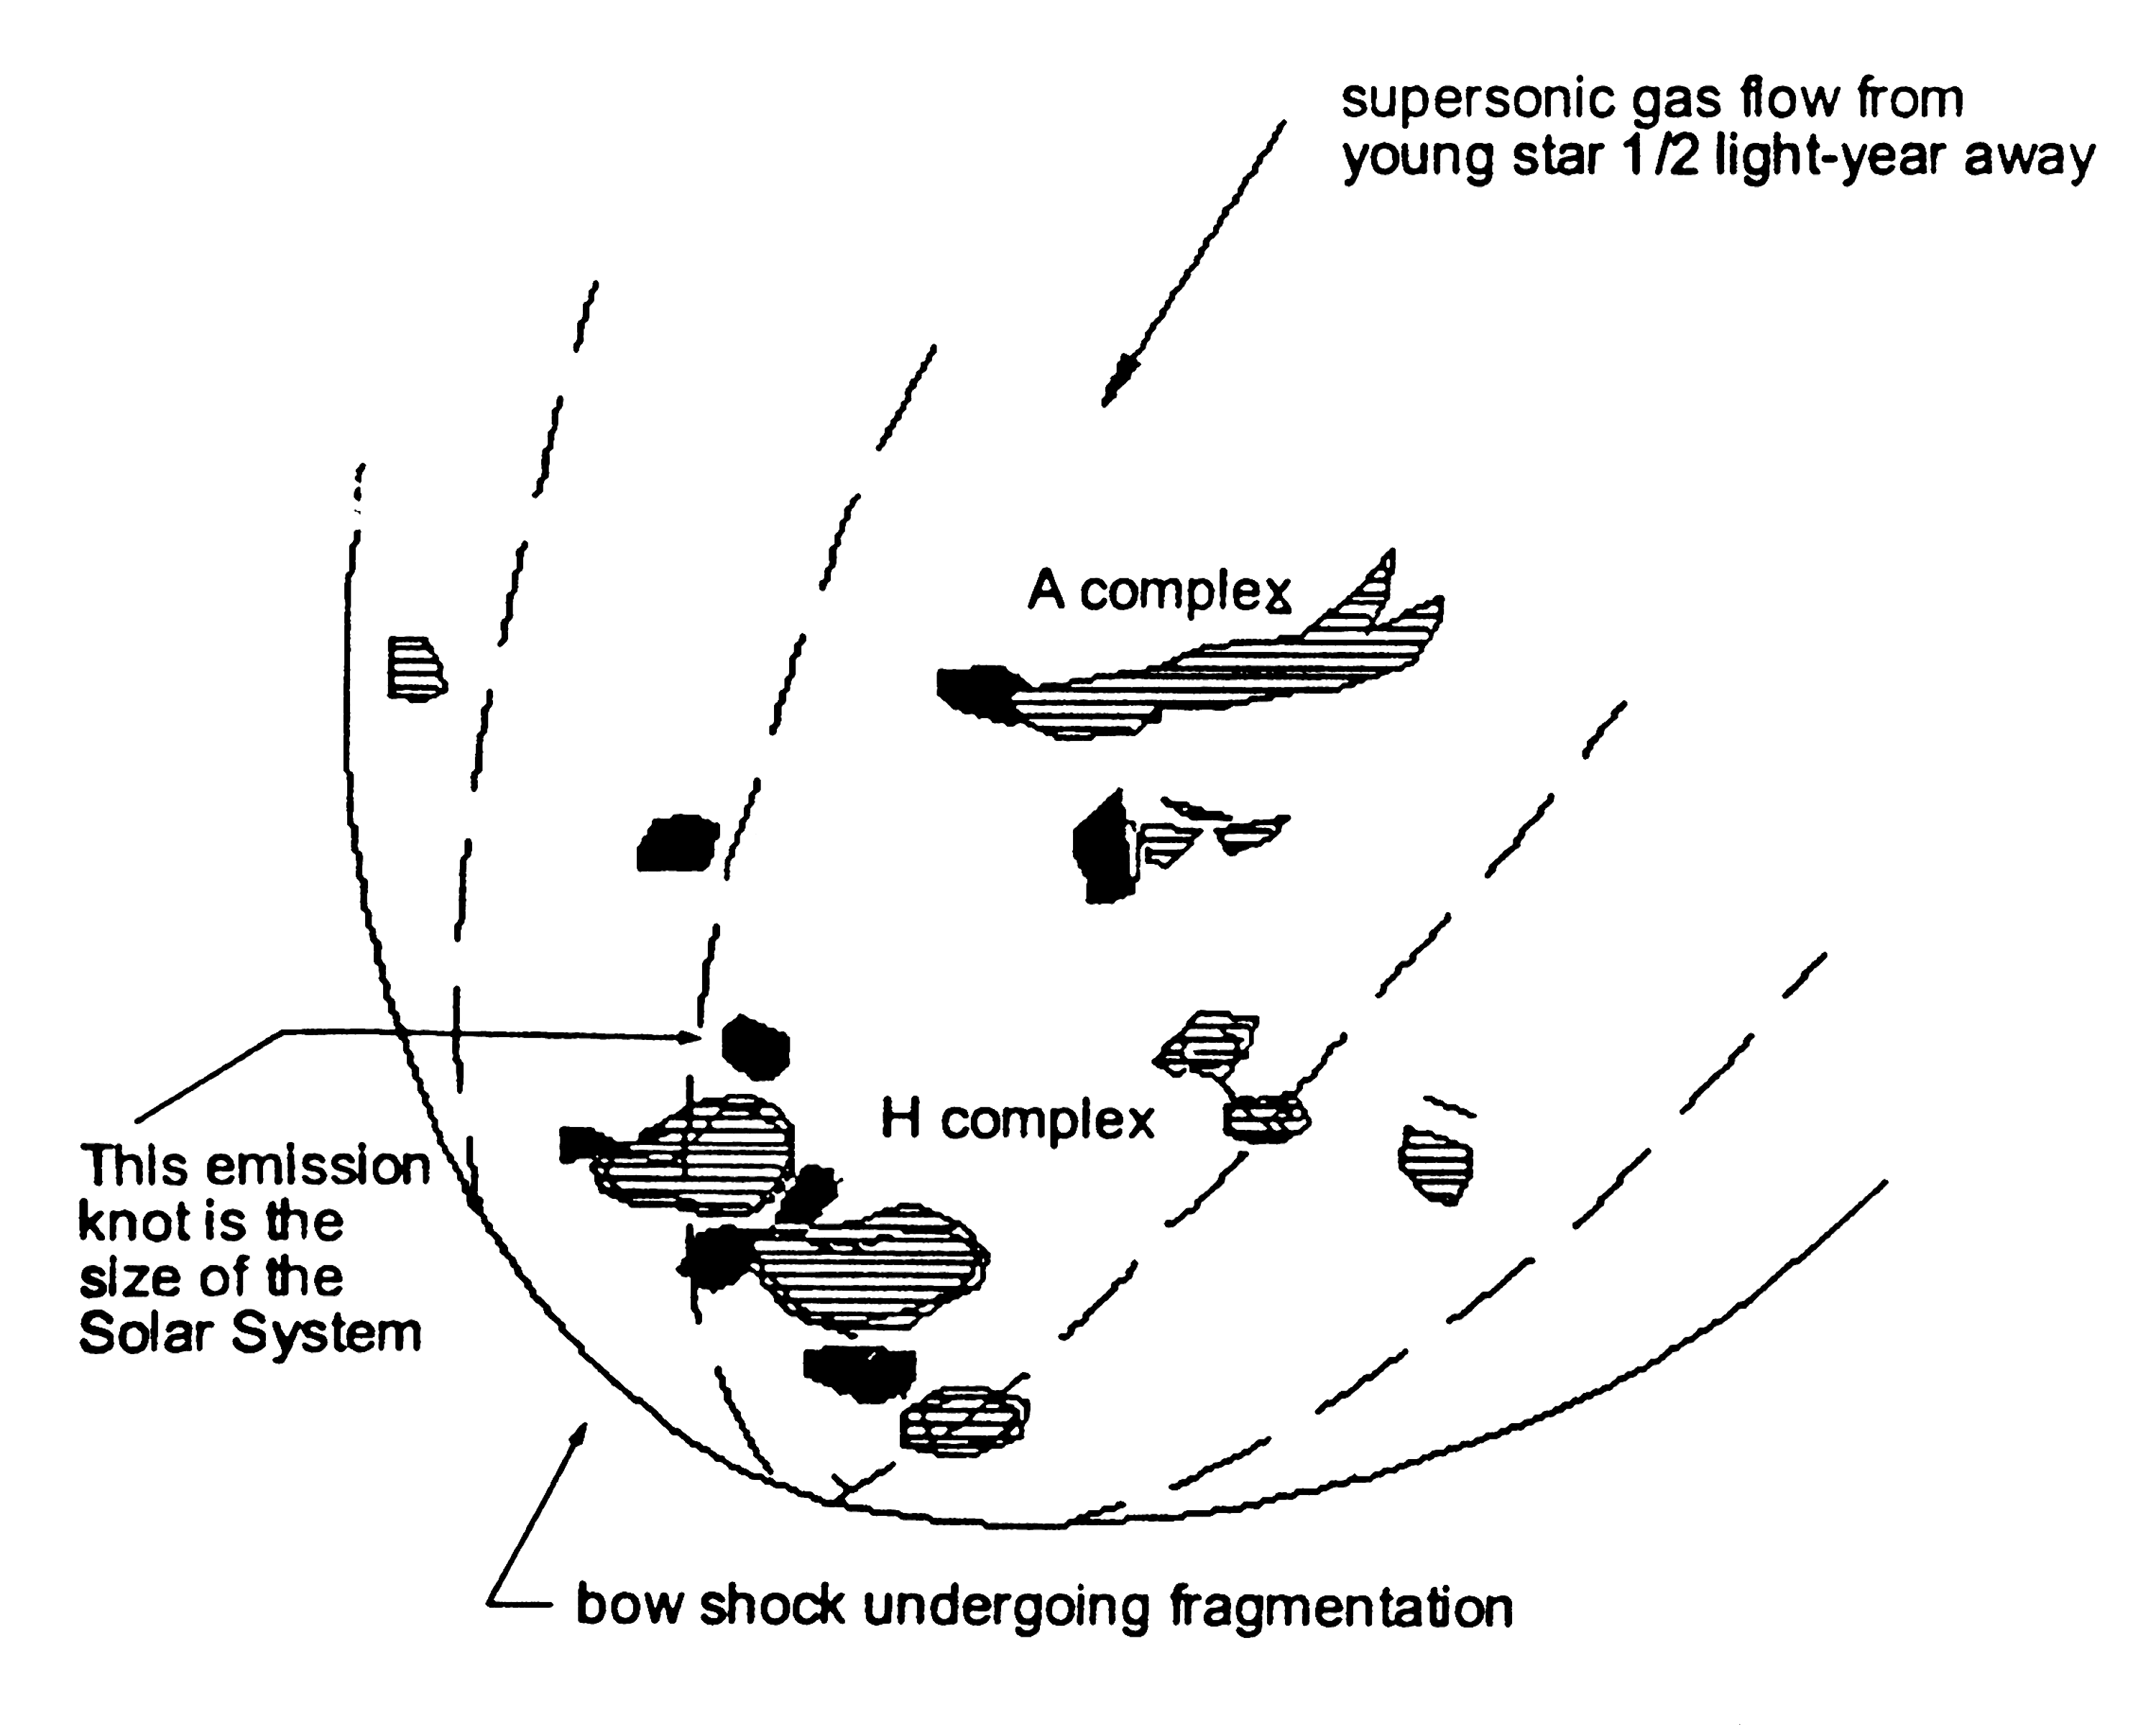

Bow shock illustration

A Bow Shock is the area in between a magnetosphere and an ambient medium. In the case of a star, it is the area between the stellar wind and the interstellar medium.

Credit: NASA & ESA